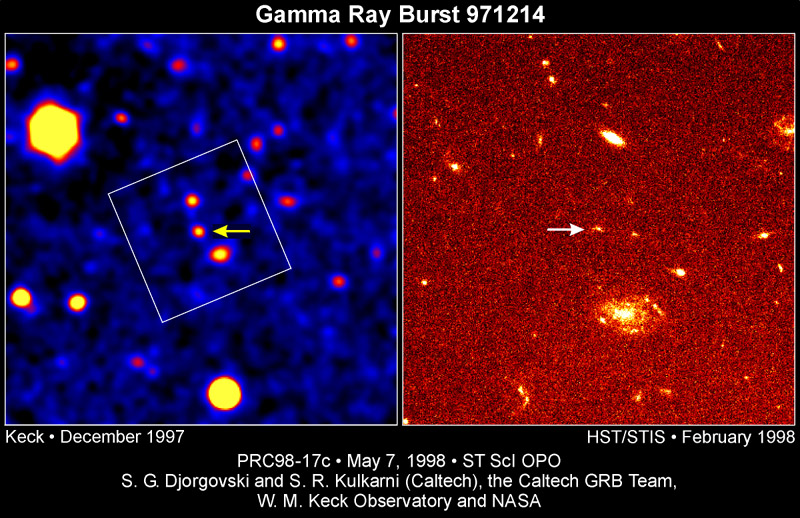

Gamma ray burst 971214

The image on the left shows the GRB 971214 field, obtained with the W.M. Keck 10-meter telescope on Mauna Kea, Hawaii about two days after the burst. The image on the right was obtained with the Space Telescope Imaging Spectrograph (STIS) aboard the Hubble Space Telescope about four months later.

Credit: S. G. Djorgovski and S. R. Kulkarni (Caltech), the Caltech GRB Team, W. M. Keck Observatory , and NASA/ESA